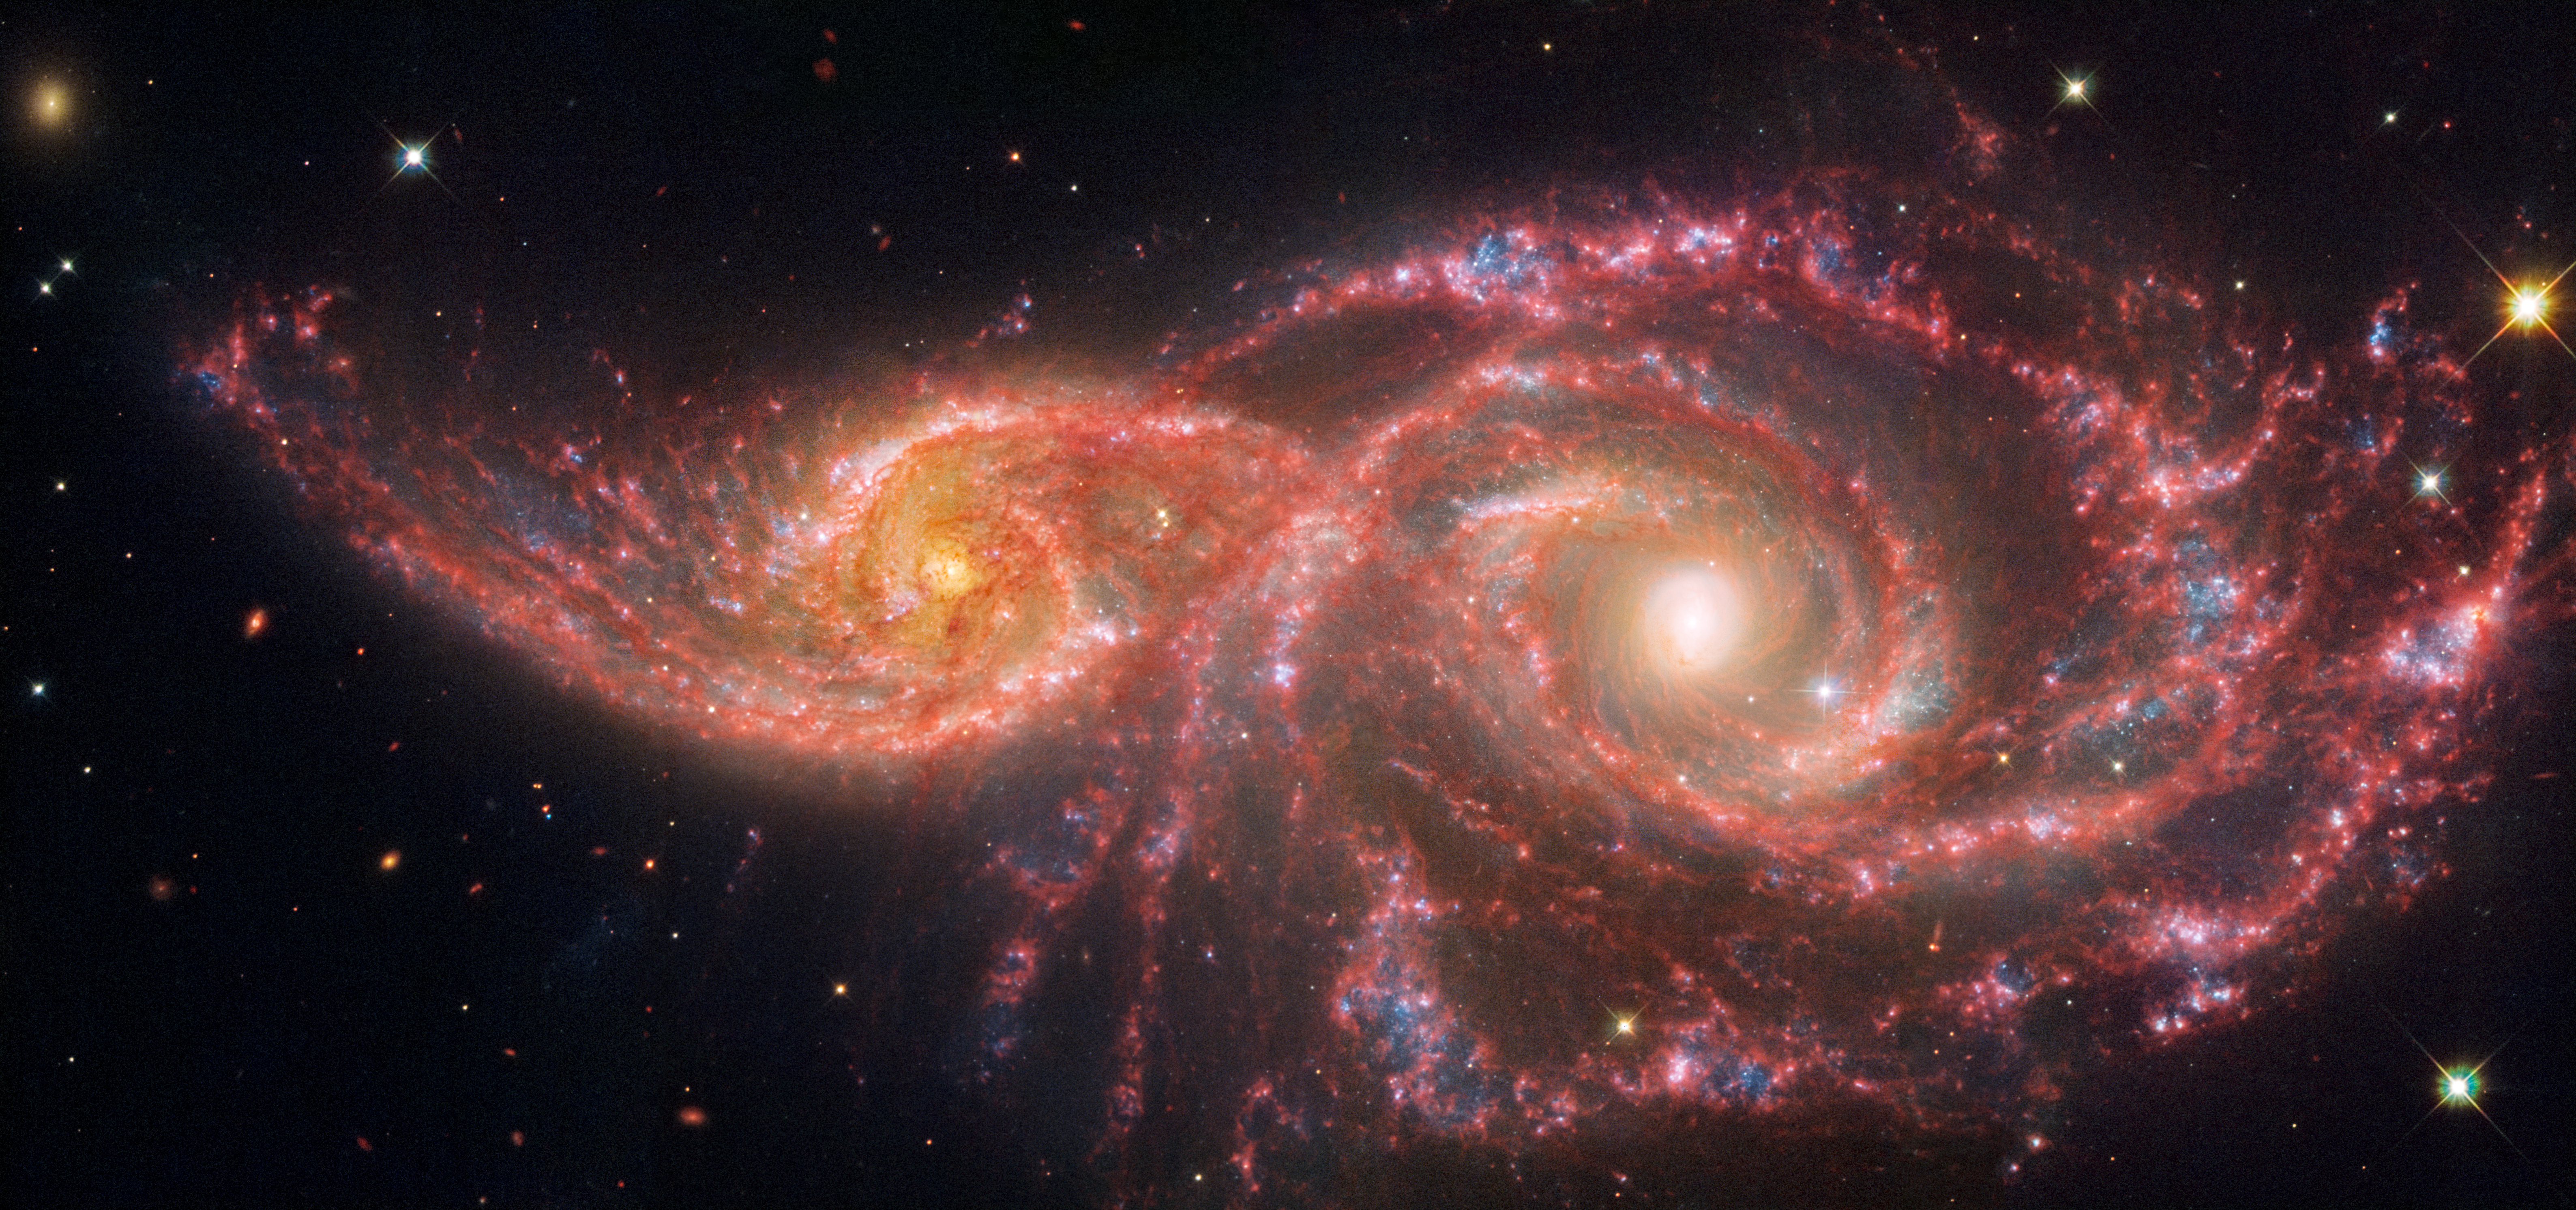

Galaxies IC 2163 and NGC 2207 (Webb and Hubble image)

The gruesome palette of these galaxies is owed to a mix of mid-infrared light from the NASA/ESA/CSA James Webb Space Telescope, and visible and ultraviolet light from the NASA/ESA Hubble Space Telescope. The pair grazed one another millions of years ago. The smaller spiral on the left, catalogued as IC 2163, passed behind NGC 2207, the larger spiral galaxy at right.

Both have increased star formation rates. Combined, they are estimated to form the equivalent of two dozen new stars that are the size of the Sun annually. Our Milky Way galaxy forms the equivalent of two or three new Sun-like stars per year.

Both galaxies have hosted seven known supernovae, each of which may have cleared space in their arms, rearranging gas and dust that later cooled, and allowed many new stars to form. (Find these areas by looking for the bluest regions).

Credit: NASA, ESA, CSA, STScI